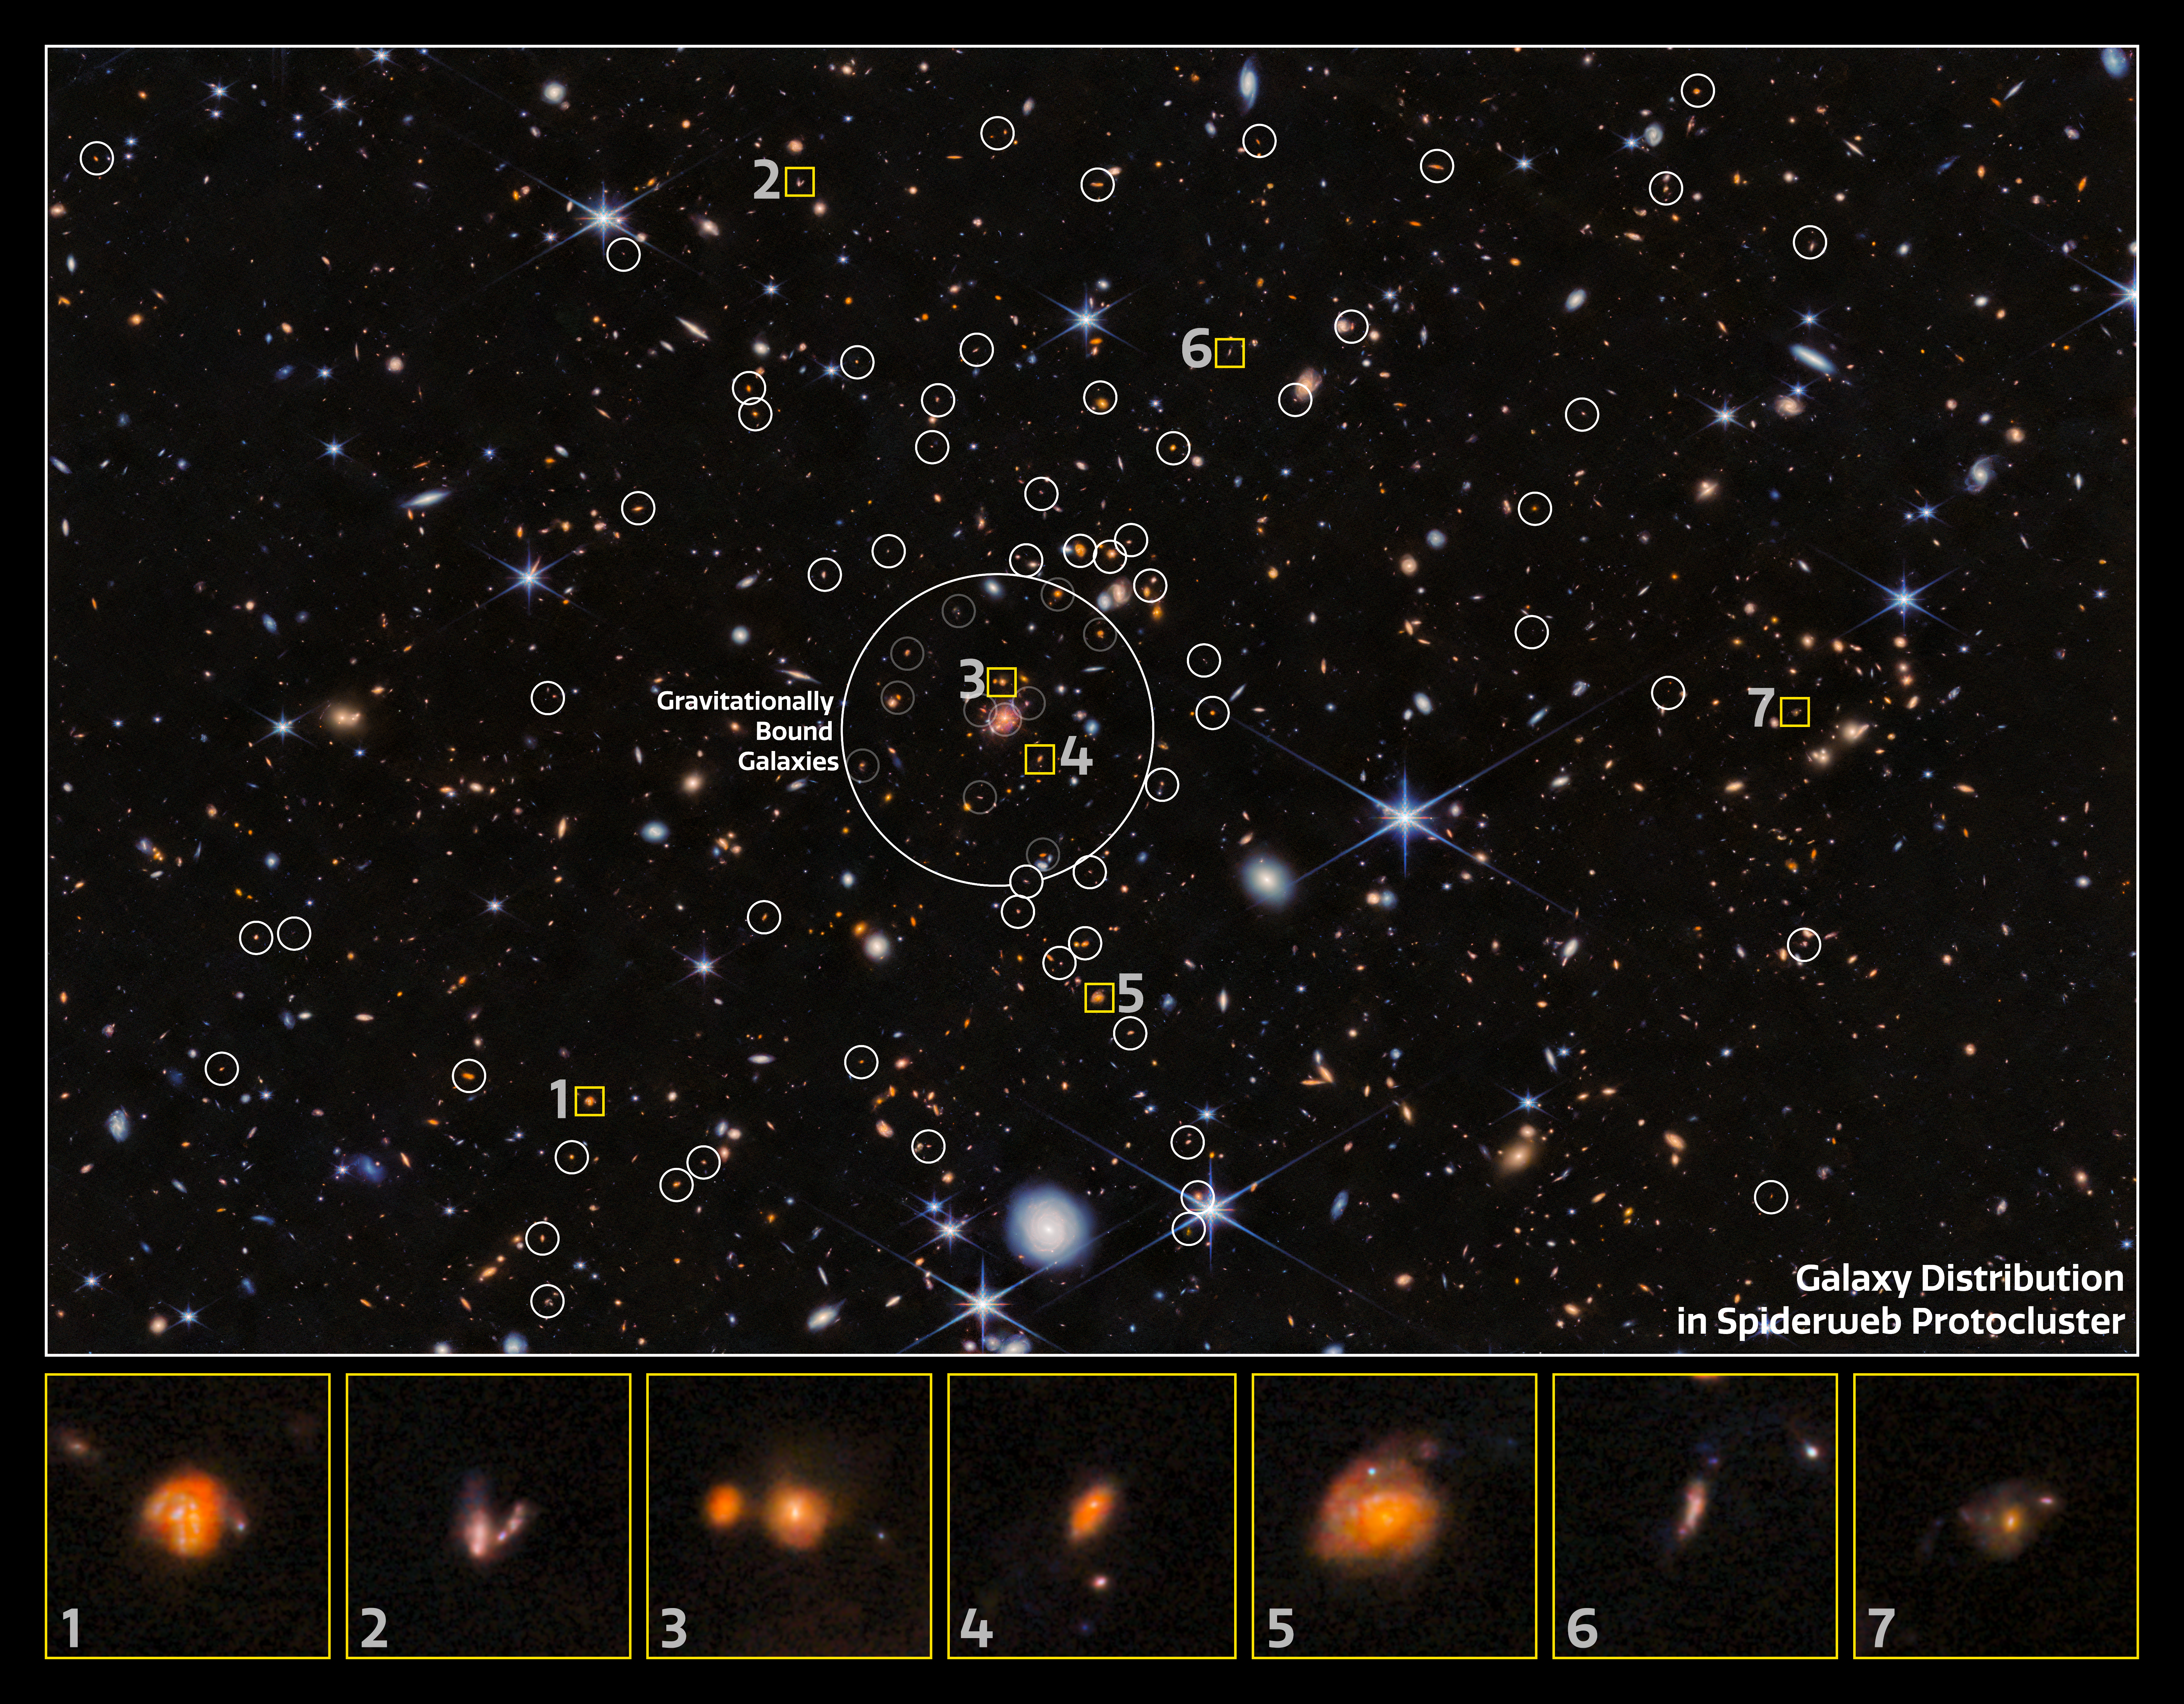

Close-up of galaxy distribution in the Spiderweb Protocluster (NIRCam, annotated)

Using the NASA/ESA/CSA James Webb Space Telescope, an international team of astronomers have found new galaxies in the Spiderweb protocluster. Their characteristics shed light on the growth of galaxies in these large cosmic cities, with the finding that gravitational interactions in these dense regions are not as important as previously thought.

With the use of Webb’s capabilities, astronomers have now sought to better understand this protocluster and to reveal new galaxies within it. Infrared radiation passes more freely through cosmic dust than visible light, which is scattered by the dust. Because Webb can see infrared light very well, scientists used it to observe regions of the Spiderweb that were previously hidden to us by cosmic dust, and to find out to what degree this dust obscures them.

This annotated image shows the galaxy distribution in the Spiderweb protocluster as seen by Webb’s NIRCam (Near-InfraRed Camera). The galaxies are annotated by white circles, and the collection of gravitationally-bound galaxies is identified in the centre of the image. A selection of these galaxies are featured as individual close-ups at the bottom of the image.

Credit: ESA/Webb, NASA & CSA, H. Dannerbauer